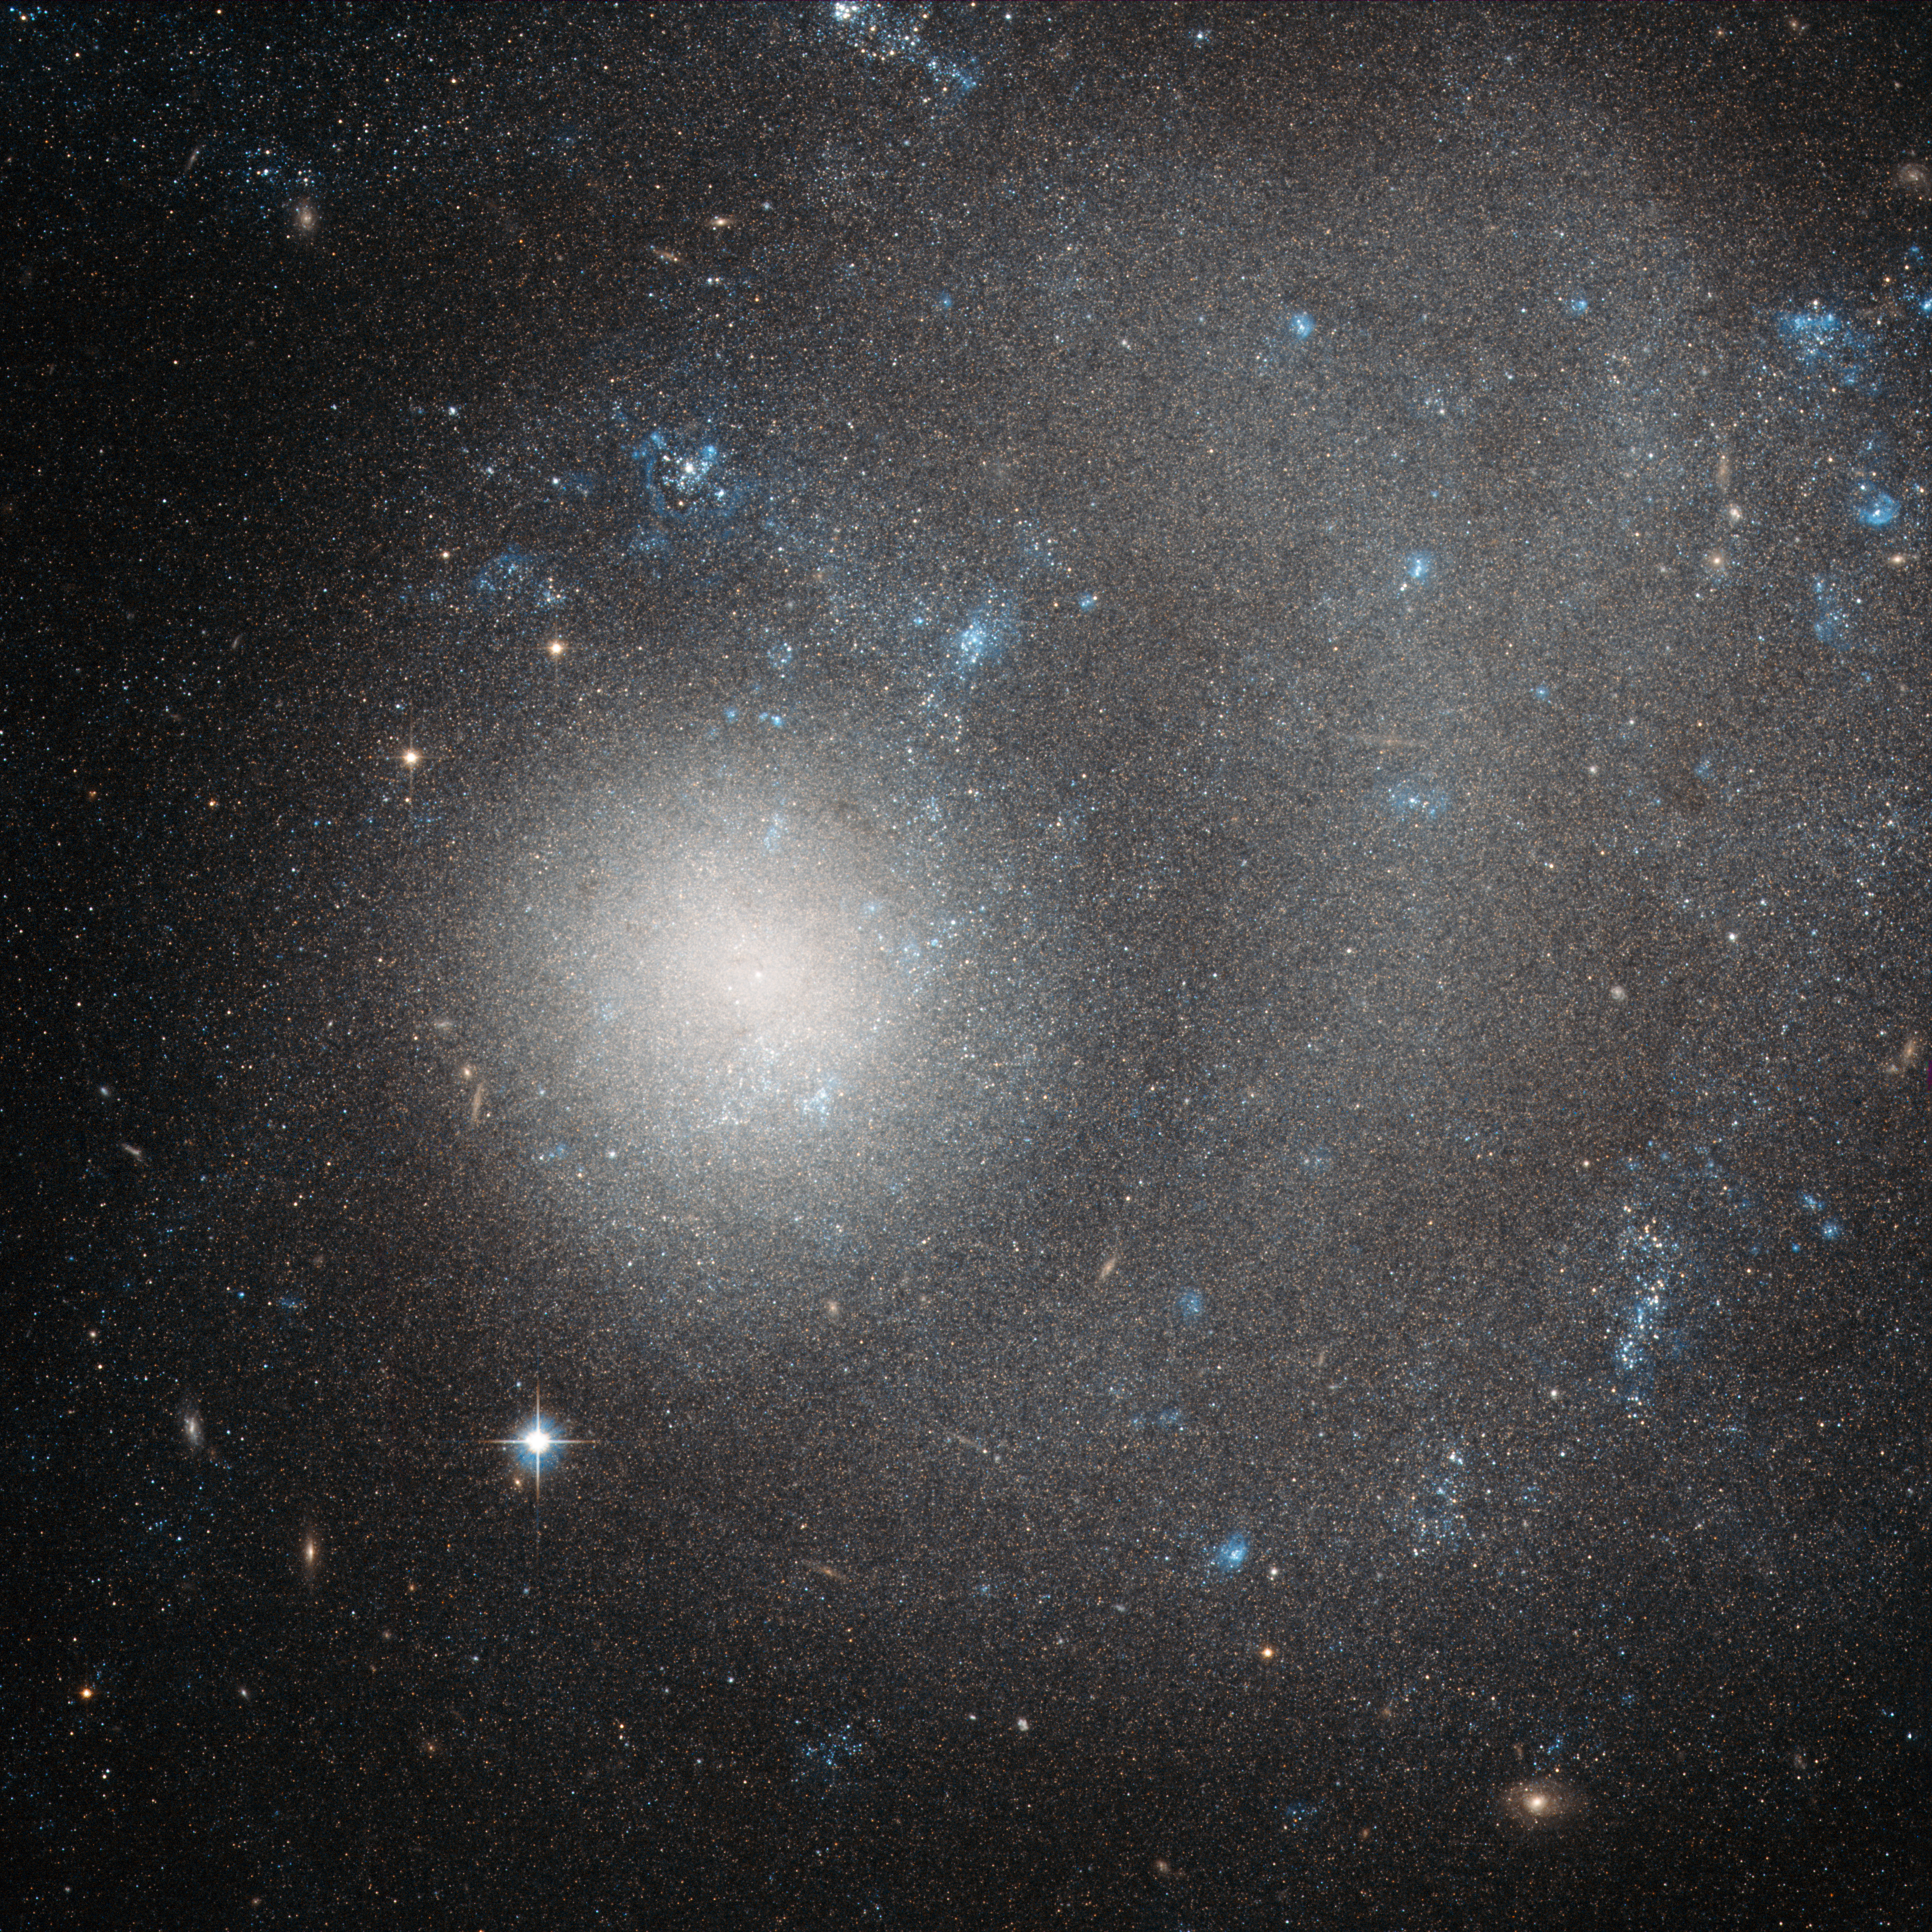

A dwarf galaxy ravaged by grand design

The subject of this new Hubble image is NGC 5474, a dwarf galaxy located 21 million light-years away in the constellation of Ursa Major (The Great Bear). This beautiful image was taken with Hubble's Advanced Camera for Surveys (ACS).

The term "dwarf galaxy" may sound diminutive, but don't let that fool you — NGC 5474 contains several billion stars! However, when compared to the Milky Way with its hundreds of billions of stars, NGC 5474 does indeed seem relatively small.

NGC 5474 itself is part of the Messier 101 Group. The brightest galaxy within this group is the well-known spiral Pinwheel Galaxy (also known as Messier 101, heic0602). This galaxy's prominent, well-defined arms classify it as a "grand design galaxy", along with other spirals Messier 81 (heic0710) and Messier 74 (heic0719).

Also within this group are Messier 101's galactic neighbours. It is possible that gravitational interactions with these companion galaxies have had some influence on providing Messier 101 with its striking shape. Similar interactions with Messier 101 may have caused the distortions visible in NGC 5474.

Both the Messier 101 Group and our own Local Group reside within the Virgo Supercluster, making NGC 5474 something of a neighbour in galactic terms.

Credit: ESA/Hubble & NASA